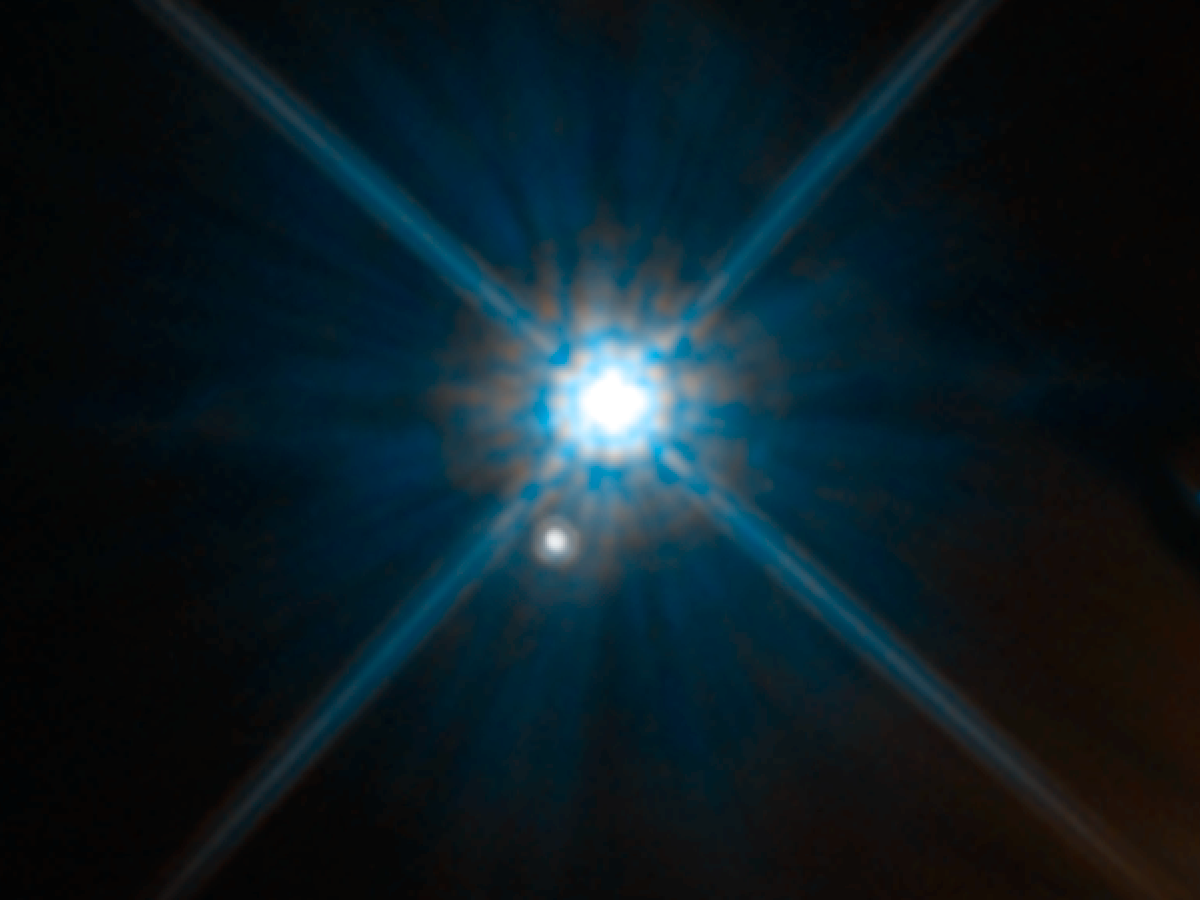

Einstein revisited

A century ago, Albert Einstein published his famous theory of relativity. He proposed that all objects physically warp the fabric of space, with larger masses producing a more pronounced effect, and very massive objects (such as the Sun) causing light to travel along curved paths through space. Such an effect was first observed during the 1919 solar eclipse by English astronomer Arthur Eddington.

Researchers had to wait a century, however, to get a telescope powerful enough to detect this gravitational microlensing caused by a star outside the Solar System. Even around objects with very large masses, such as stars, this effect is very slight, making such detections extremely challenging for ground-based telescopes. It is, however, within the capabilities of the NASA/ESA Hubble Space Telescope, which gathered the data comprising this Picture of the Week.

The bright star in the centre of the image is the nearby white dwarf Stein 2051B, only 17 light-years from Earth. The smaller star below is about 5000 light-years away. Astronomers observed Stein 2051B eight times within two years while the white dwarf travelled in front of of the distant background star. During the close alignment, the white dwarf’s gravity bent the light from the distant star, making it appear offset by about 2 milliarcseconds from its actual position. This deviation is so small that it is equivalent to observing an ant crawl across the surface of a 1€ coin from 2300 kilometres away.

Credit: NASA, ESA, and K. Sahu (STScI)